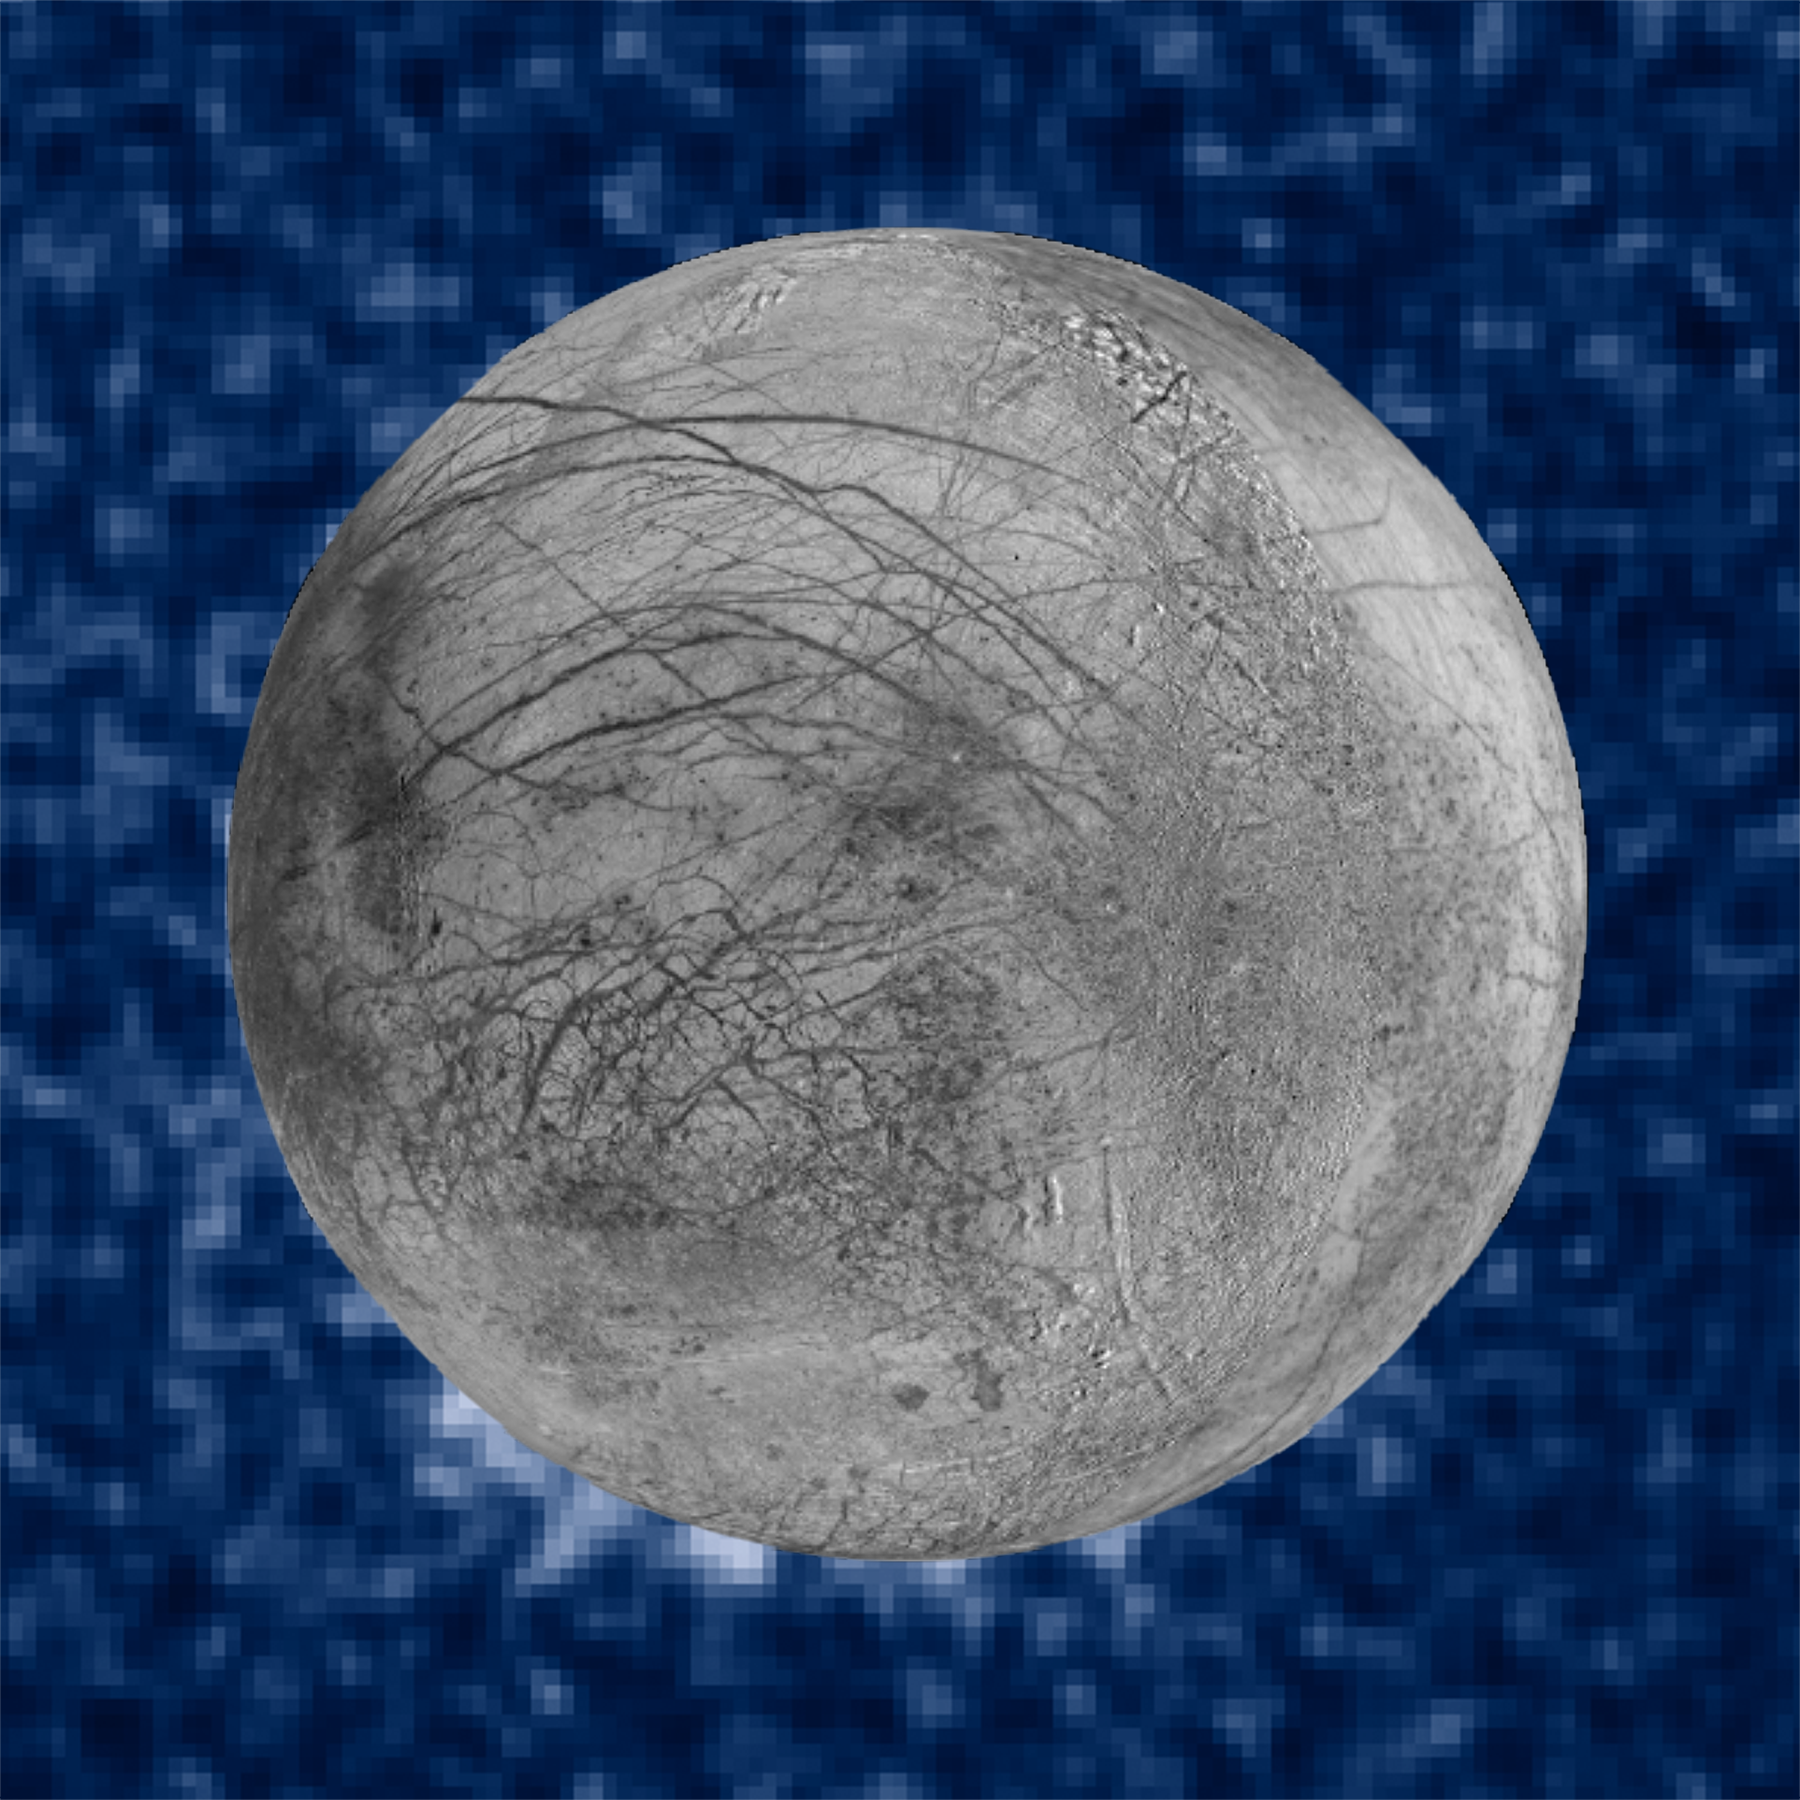

Photo composite of suspected water plumes on Europa

This composite image shows suspected plumes of water vapour erupting at the 7 o'clock position off the limb of Jupiter's moon Europa. The plumes, photographed by Hubble’s Imaging Spectrograph, were seen in silhouette as the moon passed in front of Jupiter. Hubble's ultraviolet sensitivity allowed for the features, rising over 160 kilometres above Europa's icy surface, to be discerned. The water is believed to come from a subsurface ocean on Europa. The Hubble data were taken on January 26, 2014. The image of Europa, superimposed on the Hubble data, is assembled from data from the Galileo and Voyager missions.

Credit: NASA, ESA, W. Sparks (STScI), and the USGS Astrogeology Science Center